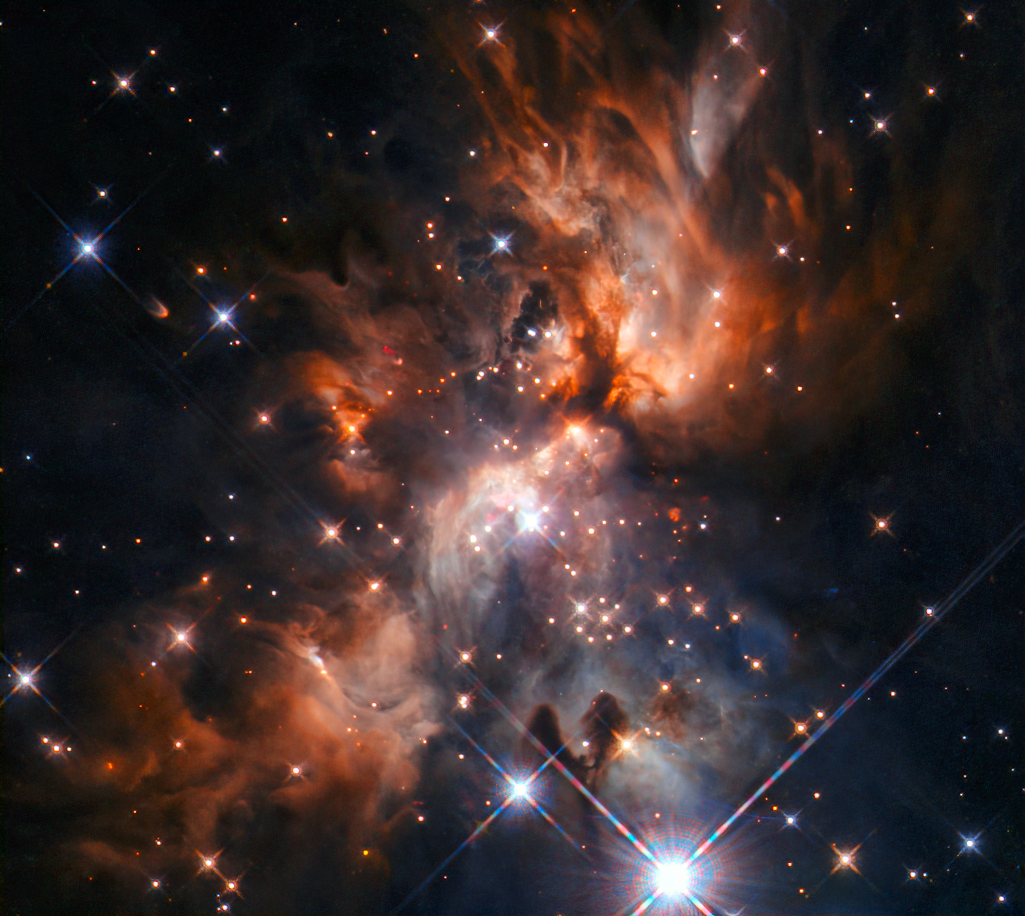

Through the Clouds

Nestled amongst the vast clouds of star-forming regions like this one lie potential clues about the formation of our own Solar System.

This week’s NASA/ESA Hubble Space Telescope Picture of the Week features AFGL 5180, a beautiful stellar nursery located in the constellation of Gemini (The Twins).

At the centre of the image, a massive star is forming and blasting cavities through the clouds with a pair of powerful jets, extending to the top right and bottom left of the image. Light from this star is mostly escaping and reaching us by illuminating these cavities, like a lighthouse piercing through the storm clouds.

Stars are born in dusty environments and although this dust makes for spectacular images, it can prevent astronomers from seeing stars embedded in it. Hubble’s Wide Field Camera 3 (WFC3) instrument is designed to capture detailed images in both visible and infrared light, meaning that the young stars hidden in vast star-forming regions like AFGL 5180 can be seen much more clearly.

Credit: ESA/Hubble & NASA, J. C. Tan (Chalmers University & University of Virginia), R. Fedriani (Chalmers University) Acknowledgement: Judy Schmidt